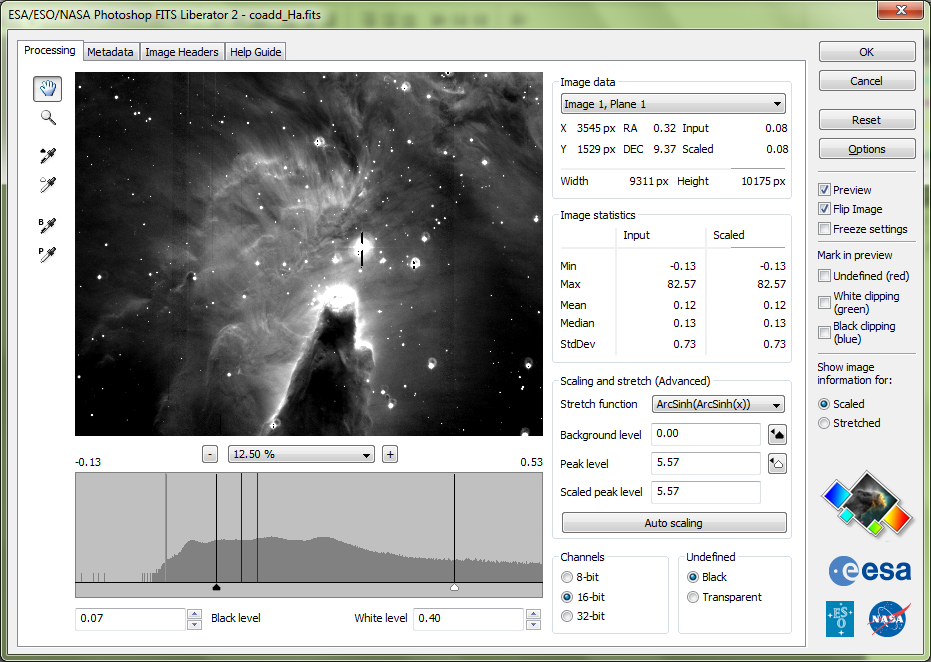

ESA/ESO/NASA Photoshop FITS Liberator v. 2.3 released

The release of version 2 of the popular ESA/ESO/NASA Photoshop FITS Liberator image processing software has meant that it is even easier and faster to create colour images using raw observations from a range of telescopes, including the NASA/ESA Hubble Space Telescope, NASA’s Spitzer Space Telescope, ESO’s Very Large Telescope and ESA’s XMM-Newton Telescope.

Version 1 of the ESA/ESO/NASA Photoshop FITS Liberator was completed in July 2004 by imaging scientists at the European Space Agency, the European Southern Observatory and NASA. FITS stands for Flexible Image Transport System. This single file format archives nearly all images of stars, nebulae and galaxies produced by major telescopes around the world. Before July 2004 this file format was primarily accessible to scientists working with highly specialised image processing tools.

More than 60,000 laypeople, educators and amateur astronomers have started using the Liberator since the release of v.1 in July 2004. The FITS Liberator has also become the industry standard for professional imaging scientists at the European Space Agency, the European Southern Observatory and NASA.

Version 2.3 of the FITS Liberator include the following new features:

Full support for Photoshop CS4 (on both Mac and Windows).
Significant performance (speed) enhancement through the usage of multiple CPUs and CPU cores as well as an improved memory management strategy (helpful especially for large images).
Support for planetary images through the PDS image format.
Metadata editing support for Photoshop CS4.
Options has been added including the histogram markers stretched mean, stretched median, peak level and background level.
It is now possible to change the default initial guess between three different modes (a specified percentage of the histogram for the black and white levels, the mean +/- the standard deviation or the median +/- the standard deviation).
The World Coordinate System (WCS) coordinates are now given when the user sweeps the image pixels with the mouse pointer.

Credit: NASA & ESA